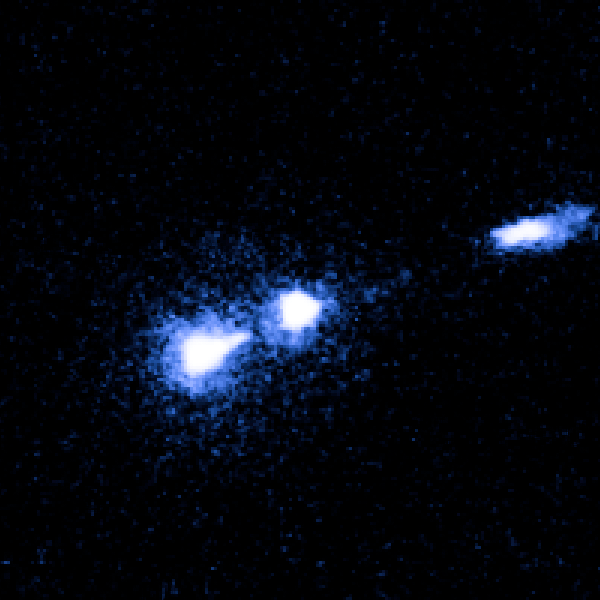

M87 nucleus and bright knot

Image taken on 17 April 2003.

Credit: NASA, ESA and J. Madrid (McMaster University, Canada)